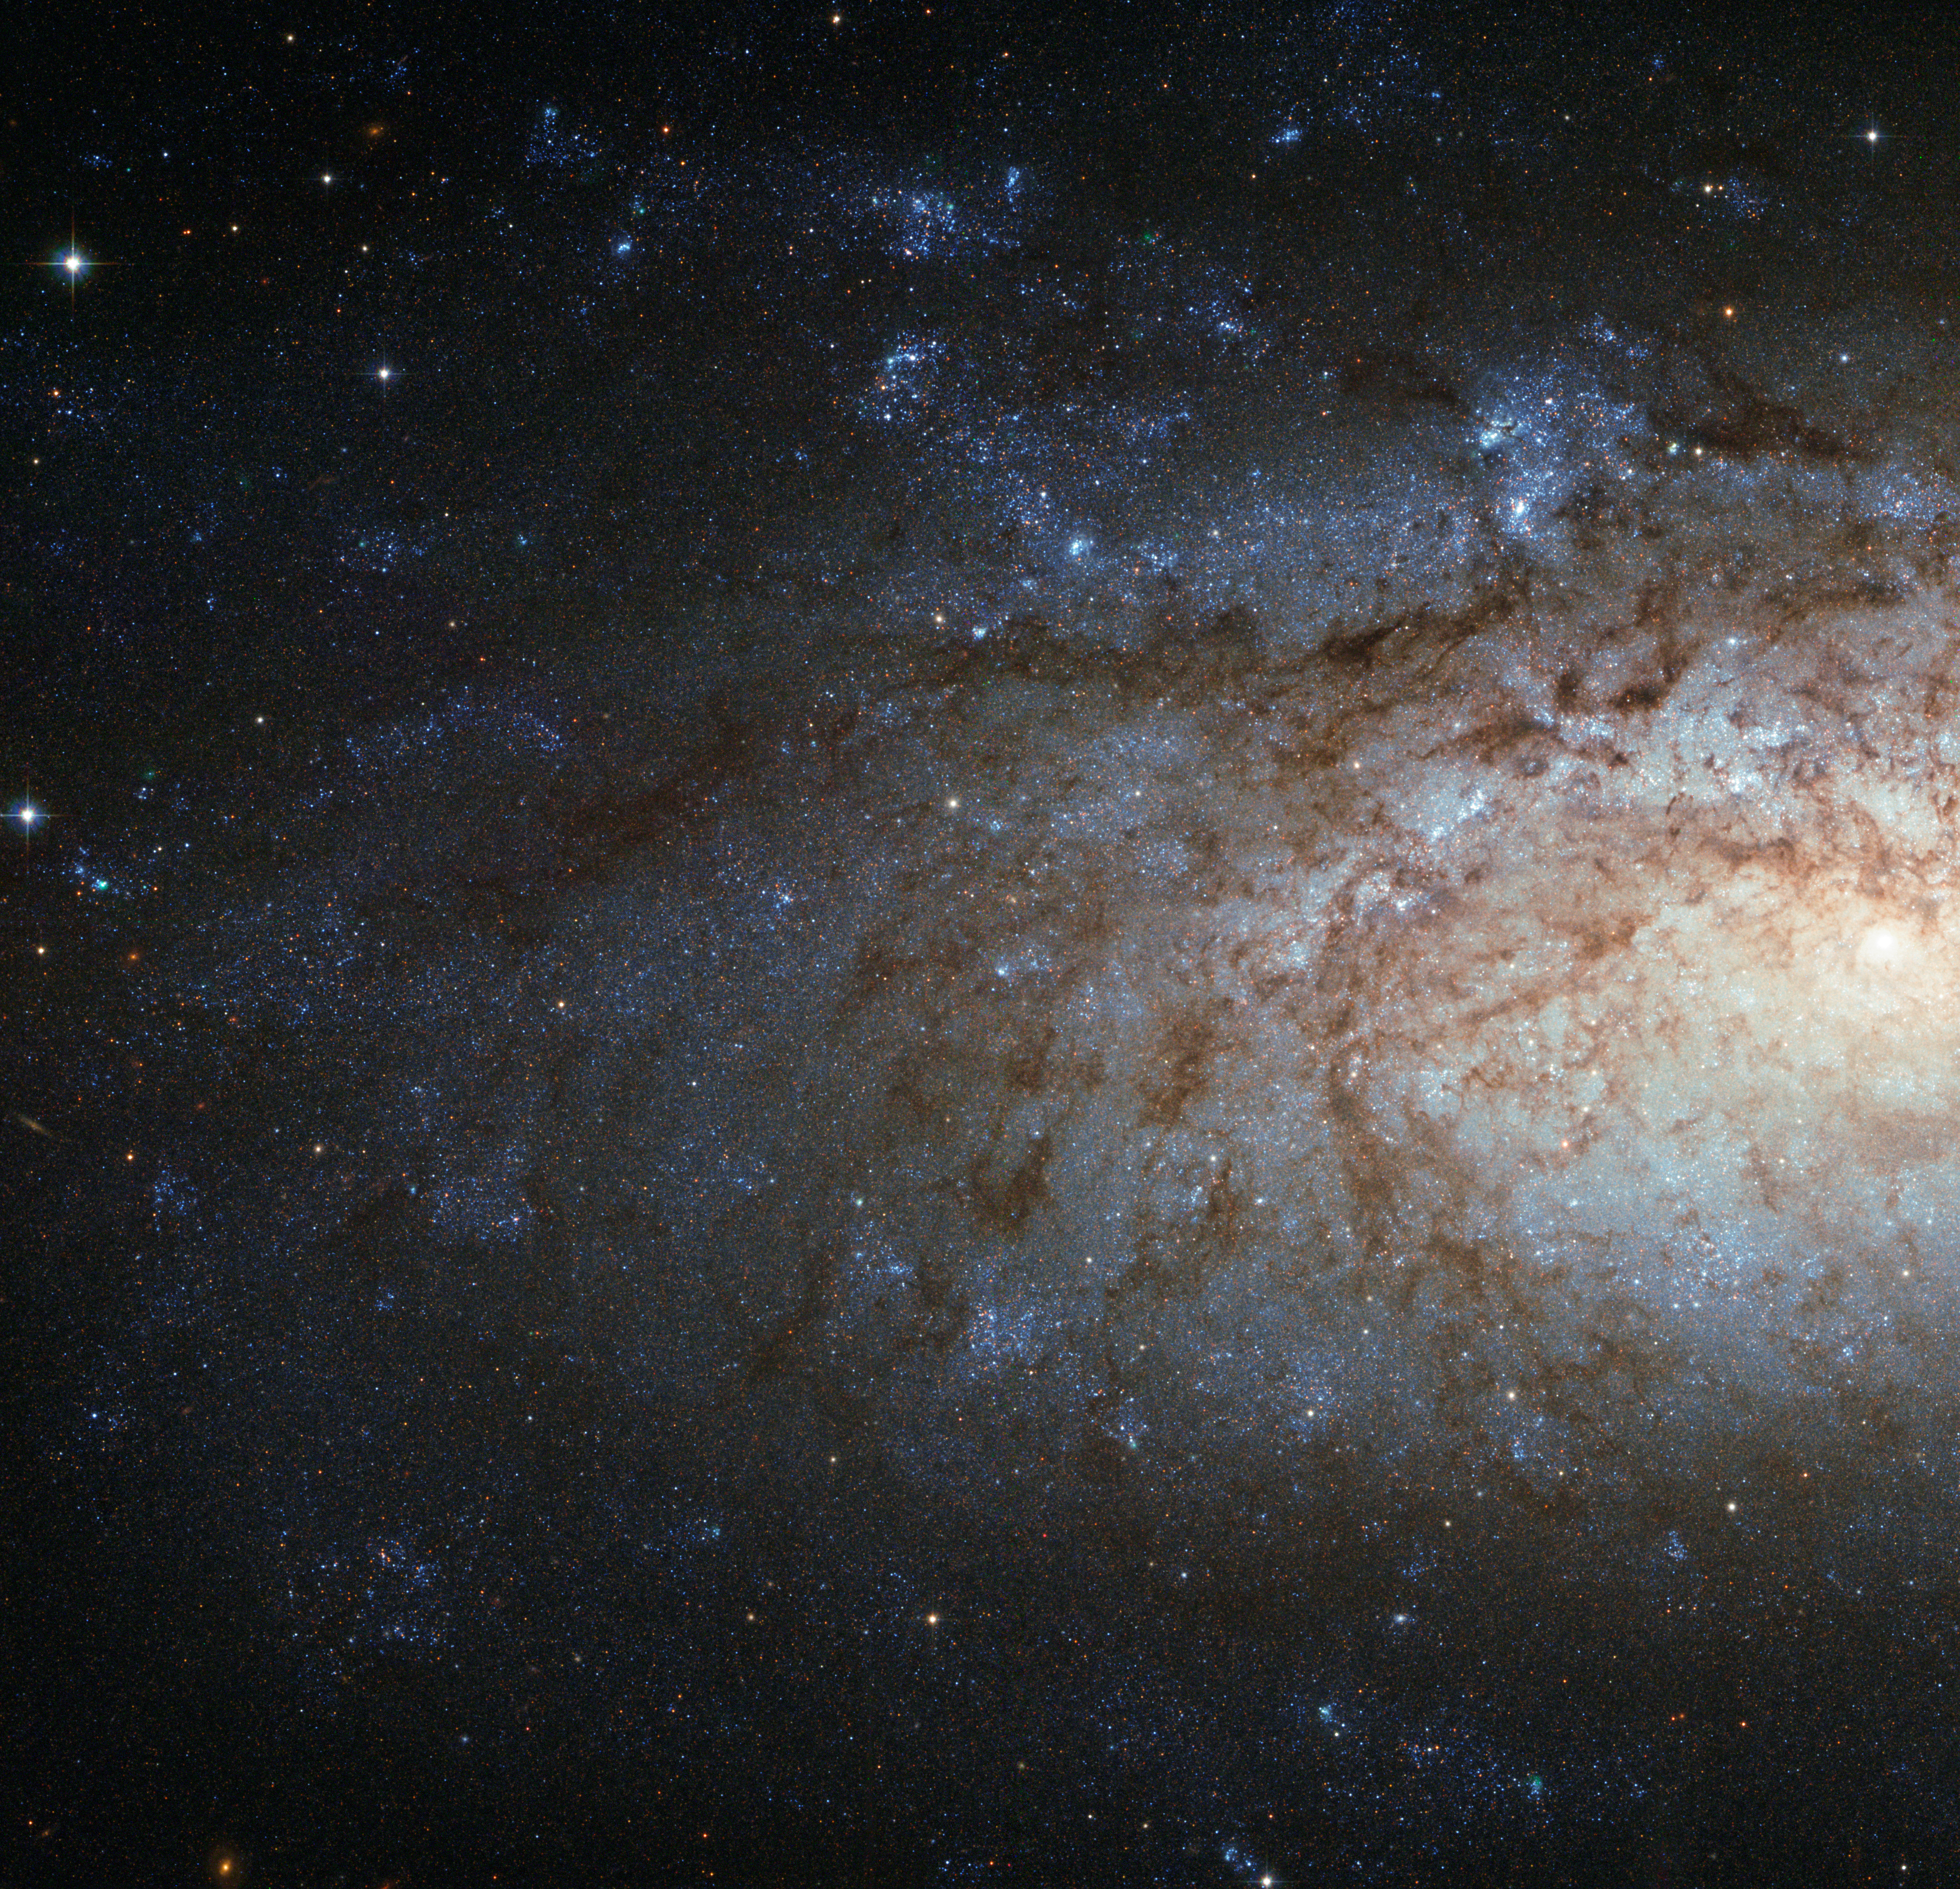

A special spiral galaxy for over 200 000 Facebook fans

This Hubble Picture of the Week is dedicated to the over 200 000 Facebook fans of ESA/Hubble, who share our passion for the NASA/ESA Hubble Space Telescope and the discoveries it brings. We thank you for staying in touch with us!

The image, captured by the NASA/ESA Hubble Space Telescope, shows part of NGC 3621, an unusual spiral galaxy located over 20 million light-years away in the constellation of Hydra (The Water Snake).

The small, bright nucleus on the right of the image does not have the significant bulge of older stars that is common in spiral galaxies, marking NGC 3621 as a "pure-disc" galaxy. Many luminous clumps of blue young stars are scattered along the loose spiral arms, which are partially obscured by the dark dust lanes snaking across the frame. This galaxy is very useful for astronomers; some of its brightest stars can be used to estimate extragalactic distances, allowing us to measure the vast scale of the Universe.

A version of this image was entered into the Hubble's Hidden Treasures image processing competition by contestant Claude Cornen. The Hubble Space Telescope is the astronomers' tele-lens; a wider view of this galaxy was obtained with ESO's Very Large Telescope (potw1148a), and a wide-angle image with the Wide-Field Imager (WFI) at ESO's La Silla Observatory (eso1104). Just as for normal landscape photography, different lenses – or telescopes, in this case! – are used depending on what the photographer wants to shoot.

Credit: ESA/Hubble & NASA Acknowledgement: Claude Cornen